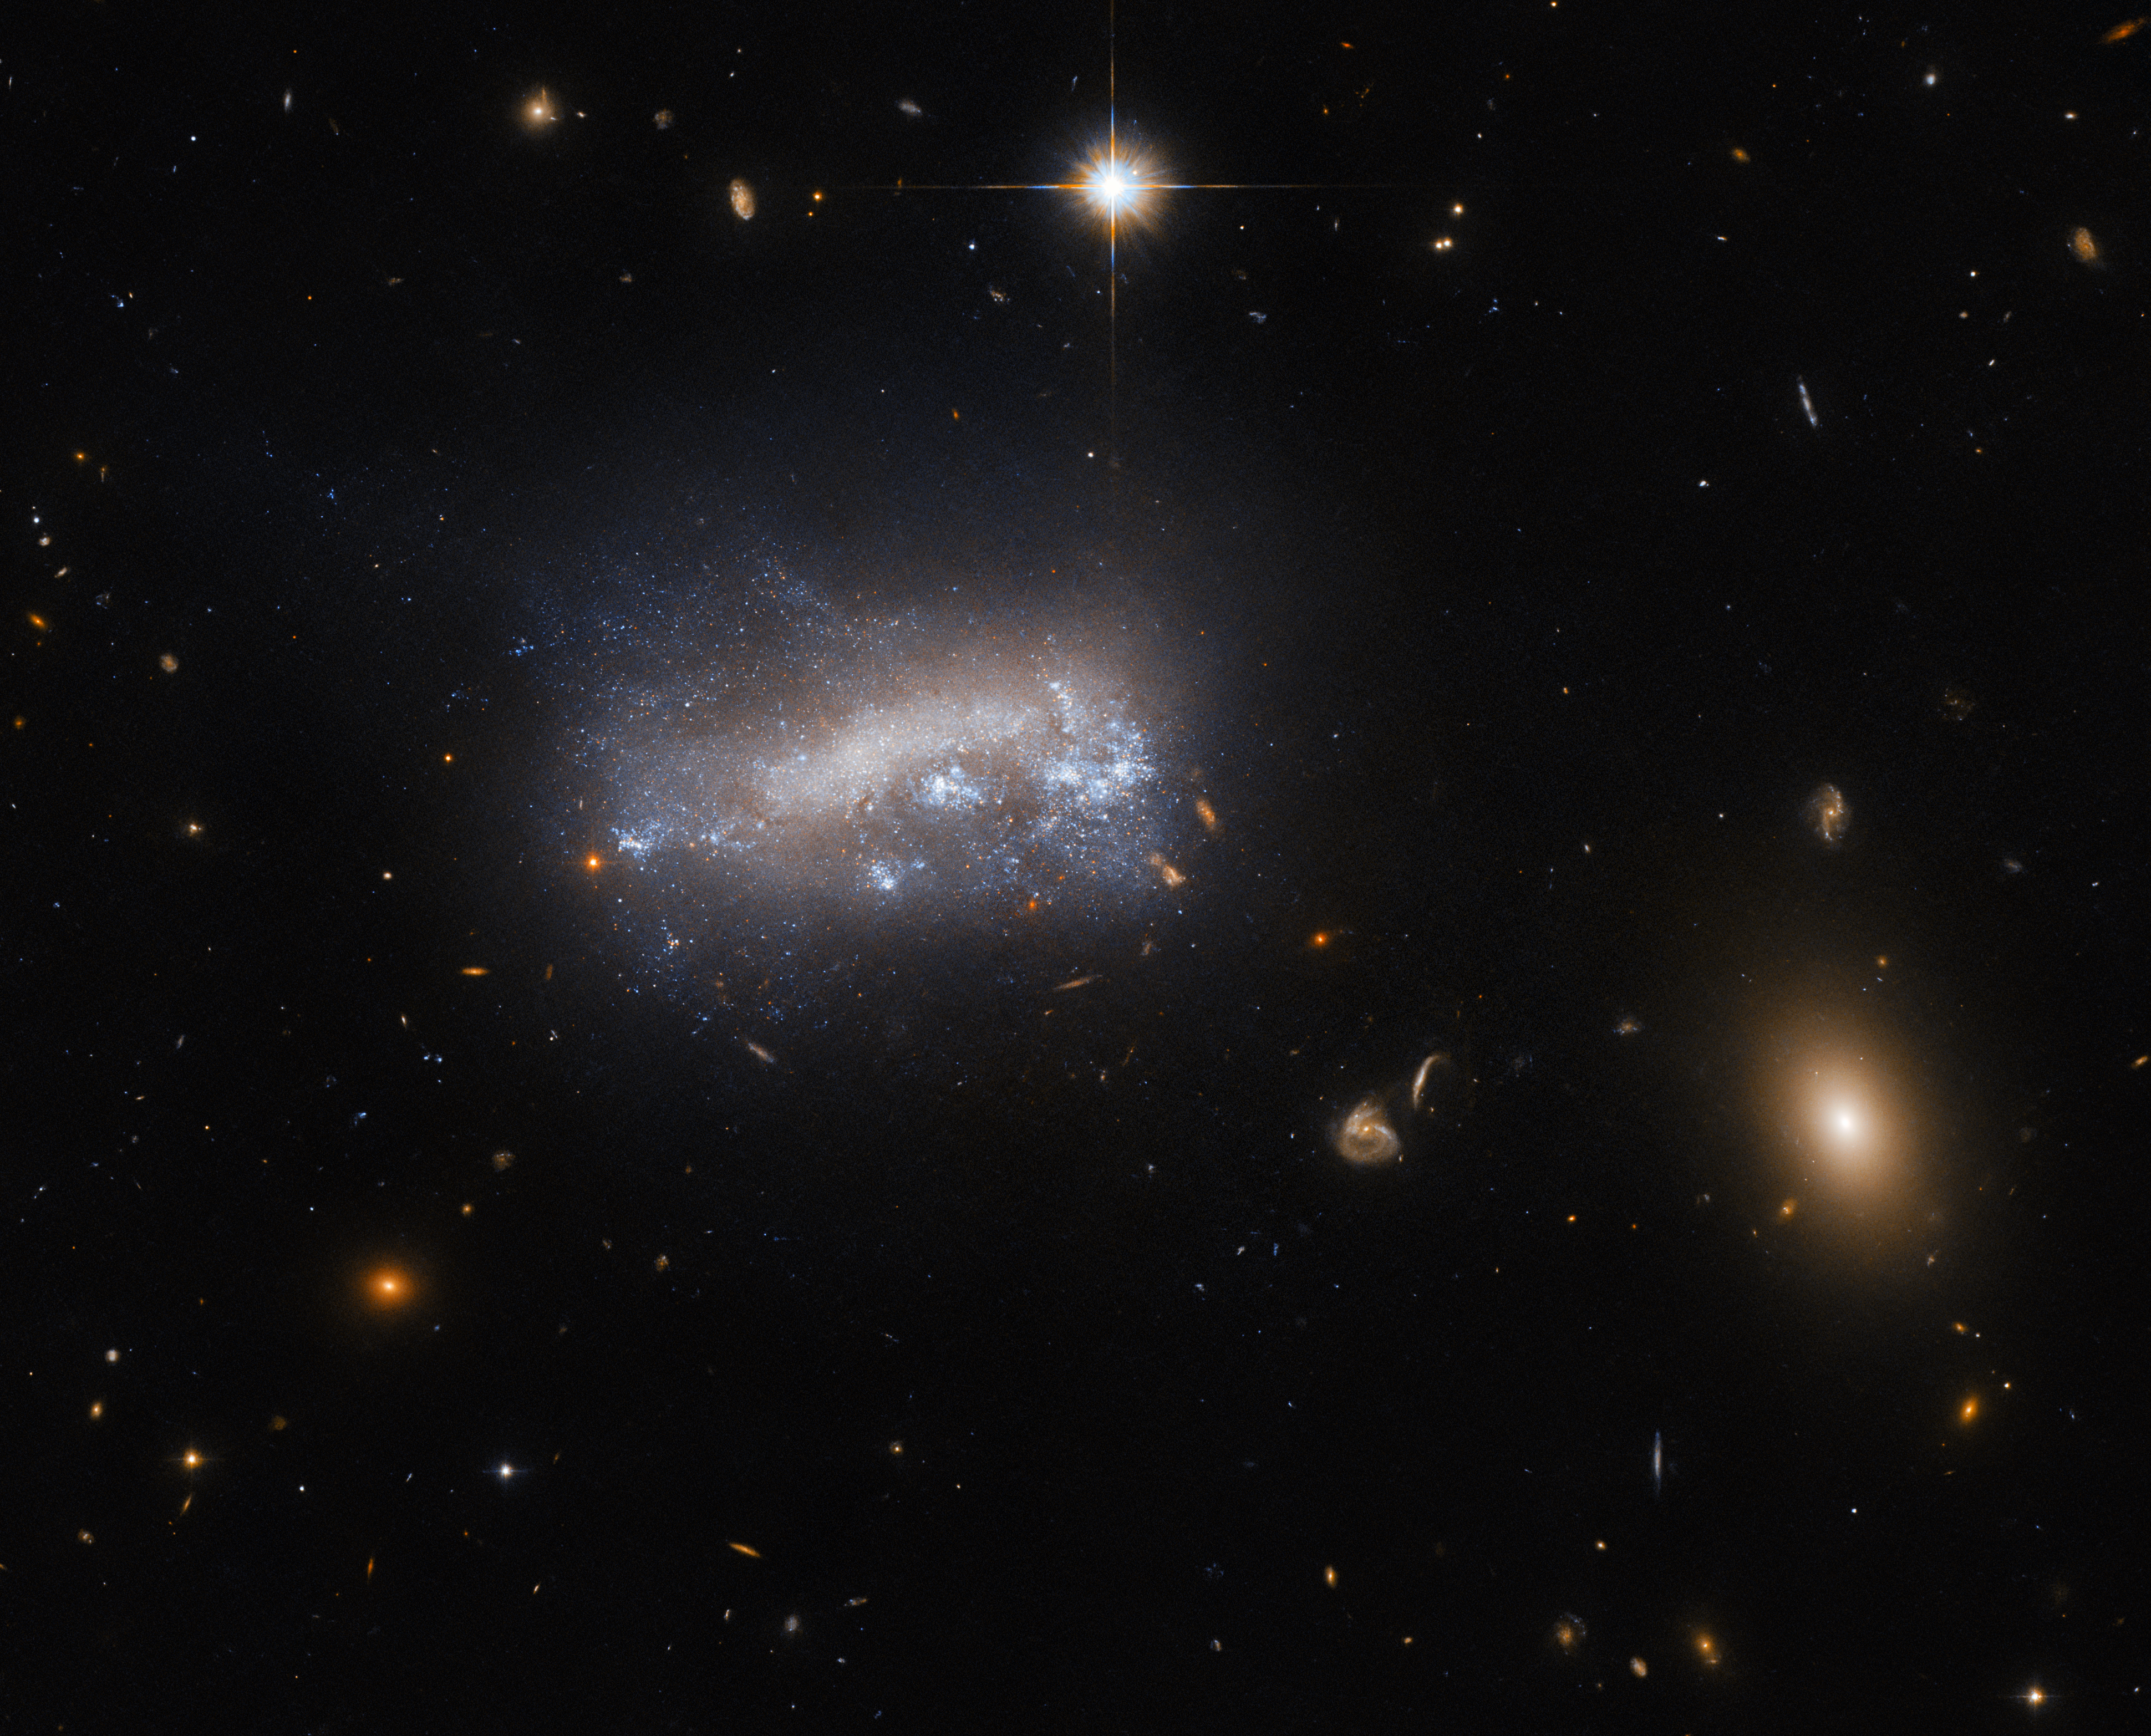

An unlikely spiral

This image shows LEDA 42160, a galaxy about 52 million light-years from Earth in the constellation Virgo. The dwarf galaxy is one of many forcing its way through the comparatively dense gas in the Virgo cluster, a massive cluster of galaxies. The pressure exerted by this intergalactic gas, known as ram pressure, has dramatic effects on star formation in LEDA 42160, which are presently being studied using the Hubble Space Telescope.

LEDA 42160 falls into the category of ‘Magellanic spiral galaxy’, or type Sm for short, under the de Vaucouleurs galaxy classification system. Magellanic spiral galaxies can be further sub-categorised as barred (SBm), unbarred (SAm) and weakly barred (SABm), where a ‘bar’ is an elongated bar-shape at a galaxy’s core. Generally speaking, Magellanic spiral galaxies are dwarf galaxies with only one single spiral arm. They are named after their prototype, the Large Magellanic Cloud, which is an SBm galaxy. Magellanic spiral galaxies are an interesting example of how galaxy categorisation is actually more nuanced than simply ‘spiral’, ‘elliptical’ or ‘irregular’.

Credit: ESA/Hubble & NASA, M. Sun